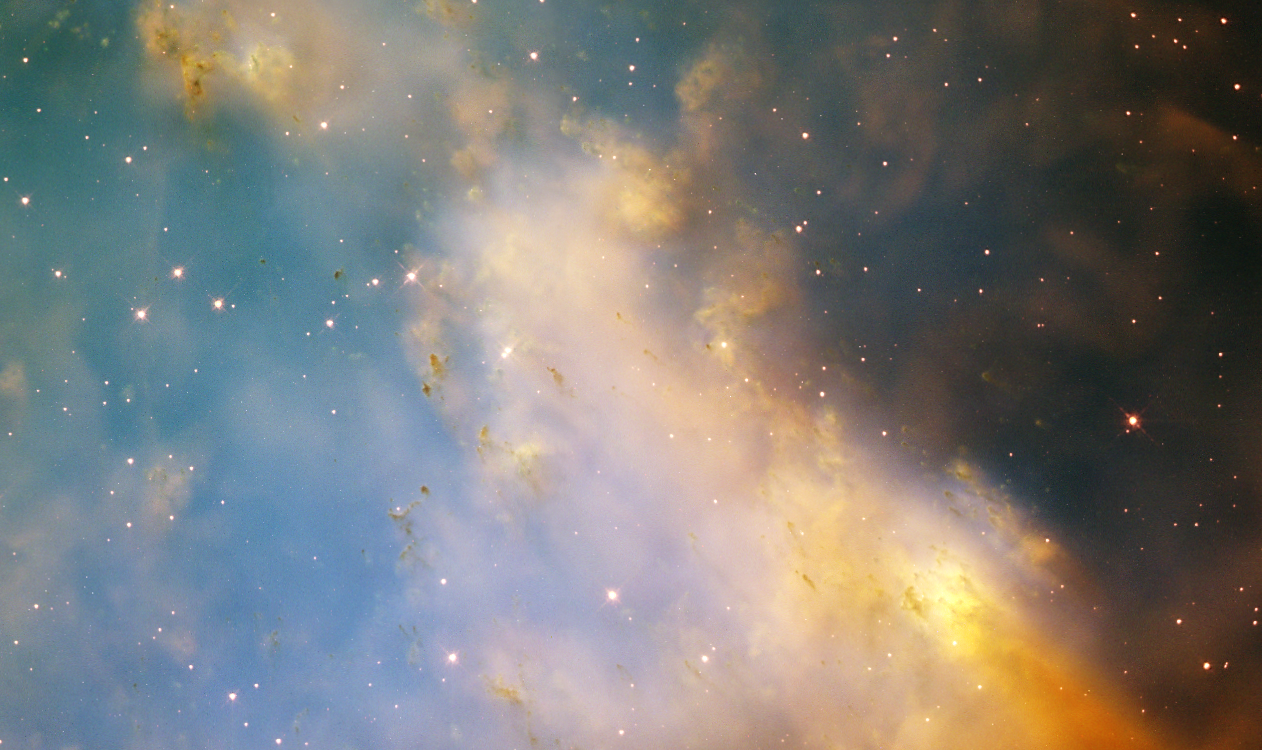

Close-up of M27, the Dumbbell Nebula

An aging star's last hurrah is creating a flurry of glowing knots of gas that appear to be streaking through space in this close-up image of the Dumbbell Nebula, taken with NASA/ESA Hubble Space Telescope.

The Dumbbell, a nearby planetary nebula residing more than 1,200 light-years away, is the result of an old star that has shed its outer layers in a glowing display of colour. The nebula, also known as Messier 27 (M27), was the first planetary nebula ever discovered. French astronomer Charles Messier spotted it in 1764.

Credit: NASA/ESA and the Hubble Heritage Team (STScI/AURA)